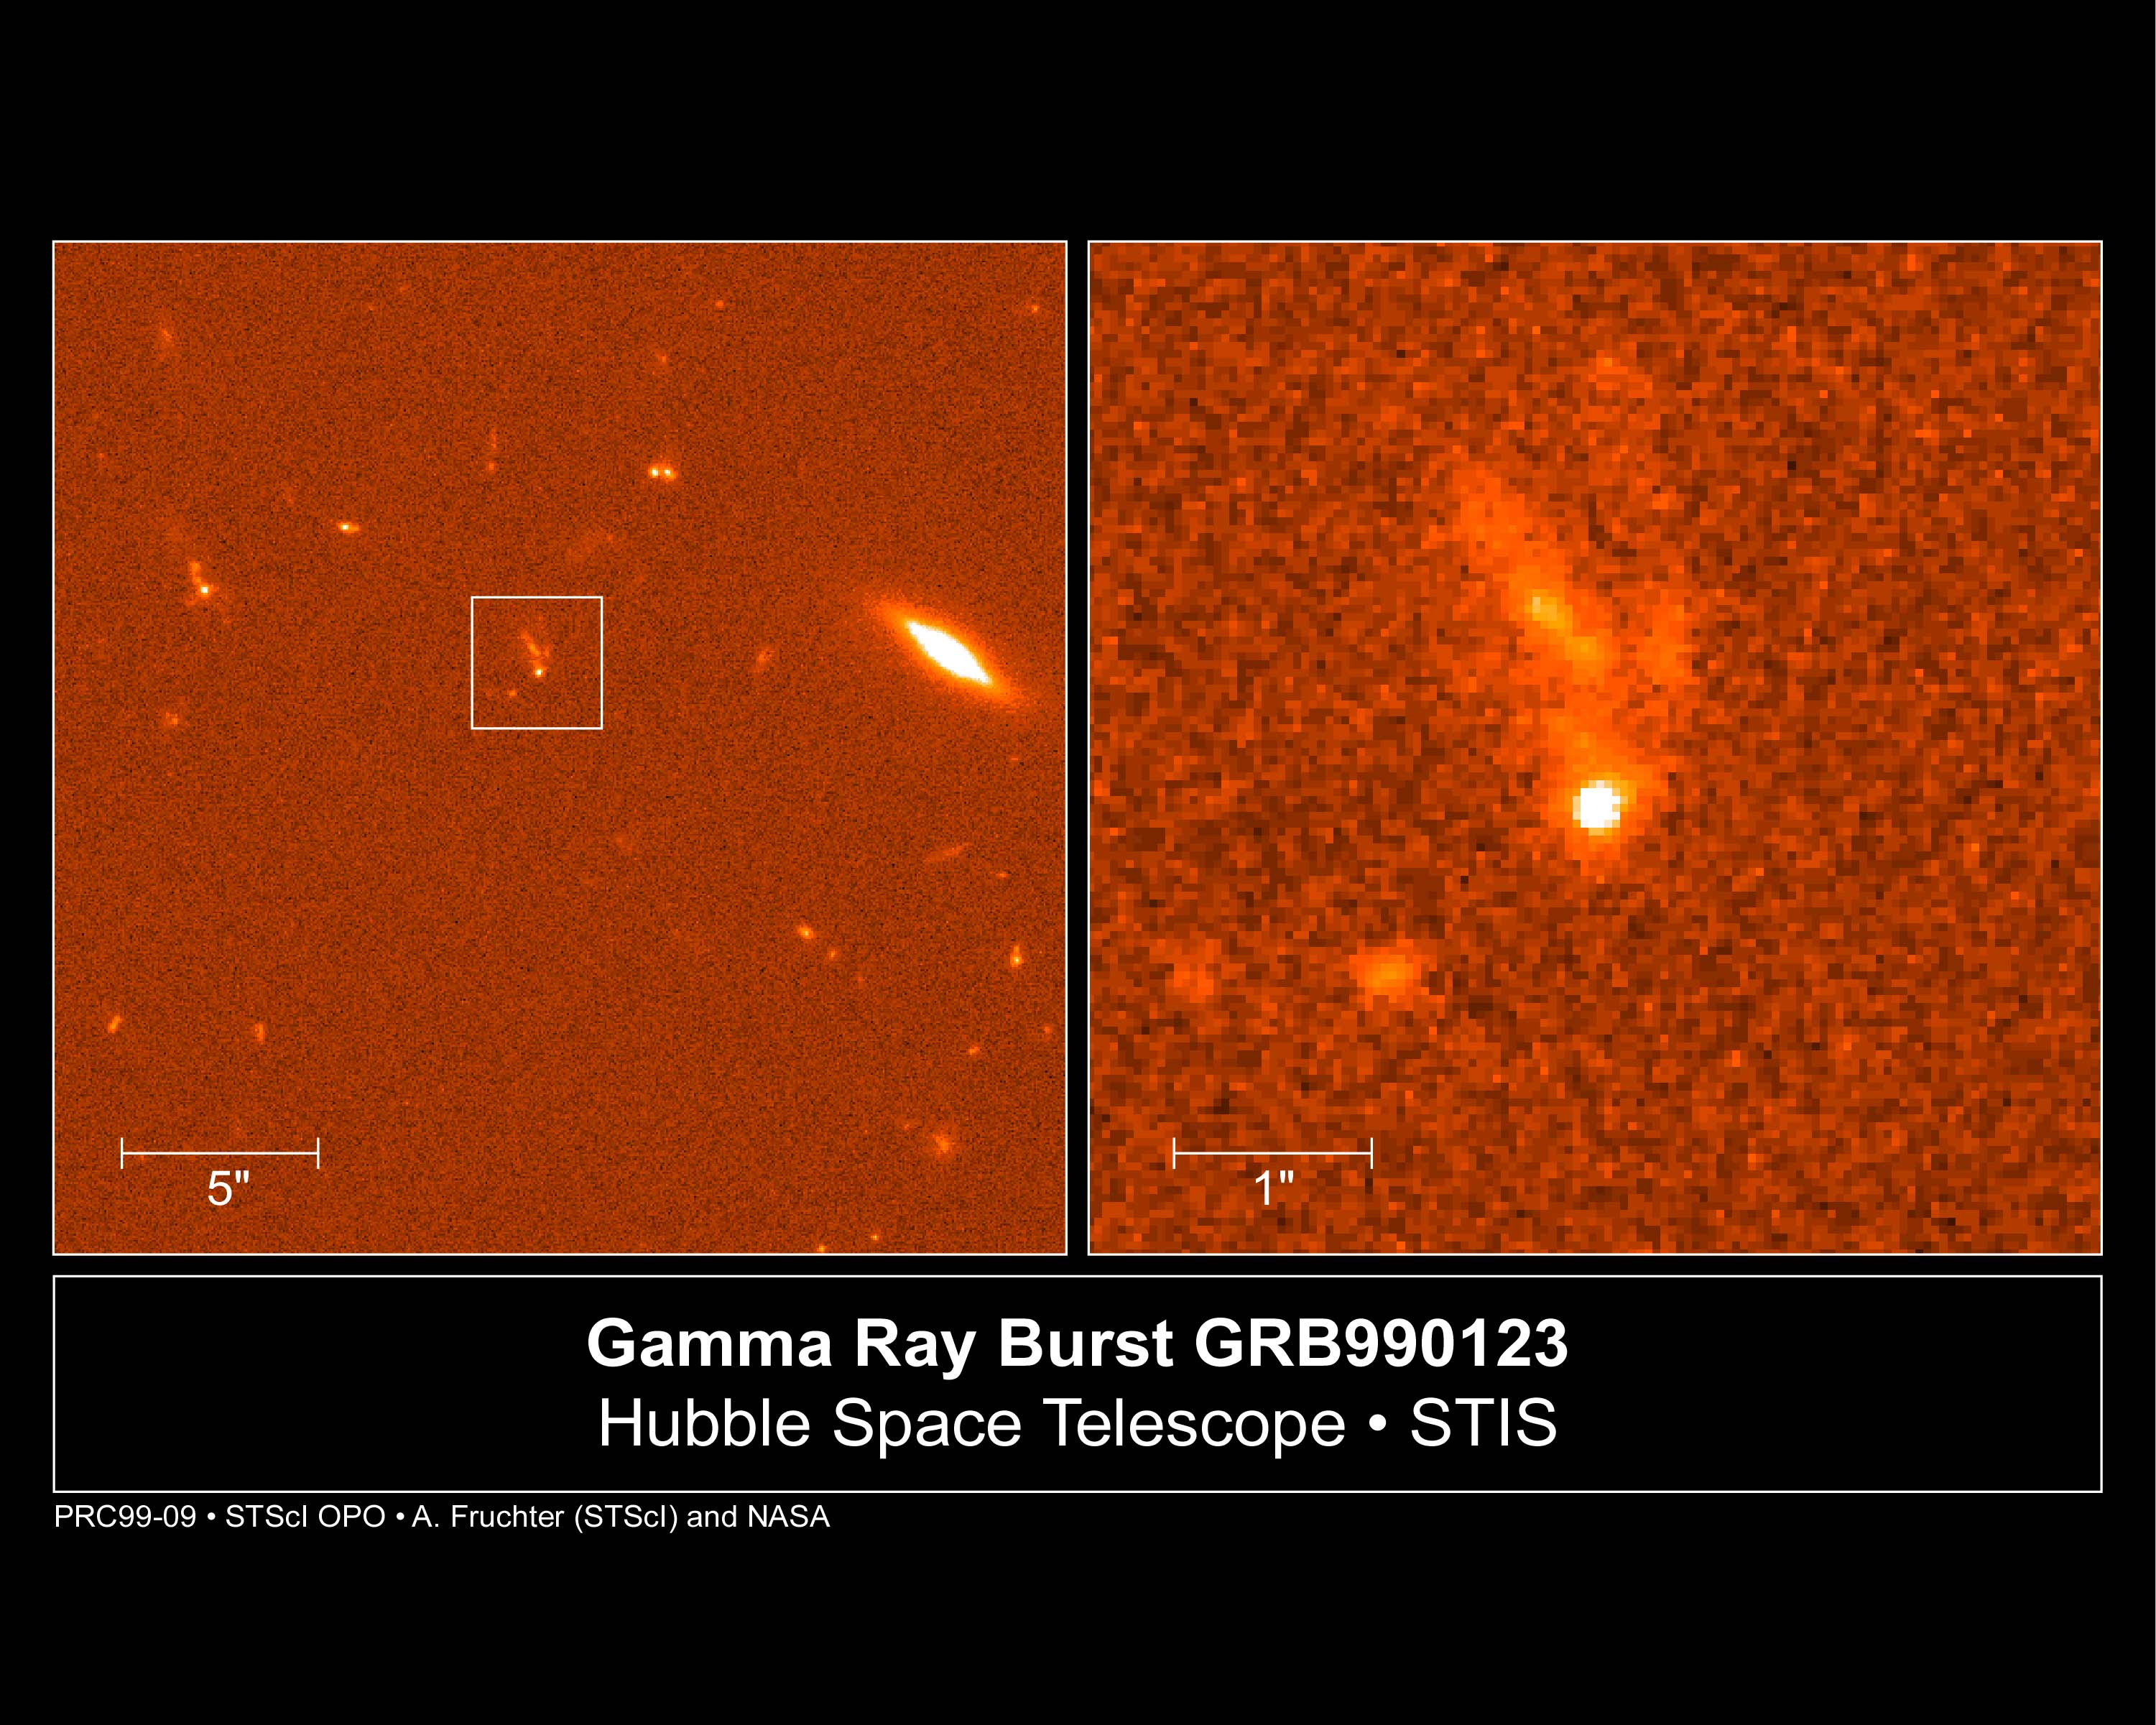

Gamma ray burst GRB990123

A NASA/ESA Hubble Space Telescope view of the rapidly fading visible-light fireball from the most powerful cosmic explosion recorded to date. For a brief moment the light from the blast was equal to the radiance of 100 million billion stars. The initial explosion began as an intense burst of gamma-rays which happened on Jan. 23, 1999.

The blast had already faded to one four-millionth of its original brightness when Hubble made observations on February 8 and 9. Space Telescope captured the fading fireball embedded in a galaxy located 2/3 of the way to the horizon of the observable universe.

Credit: Andrew Fruchter (STScI) and NASA/ESA